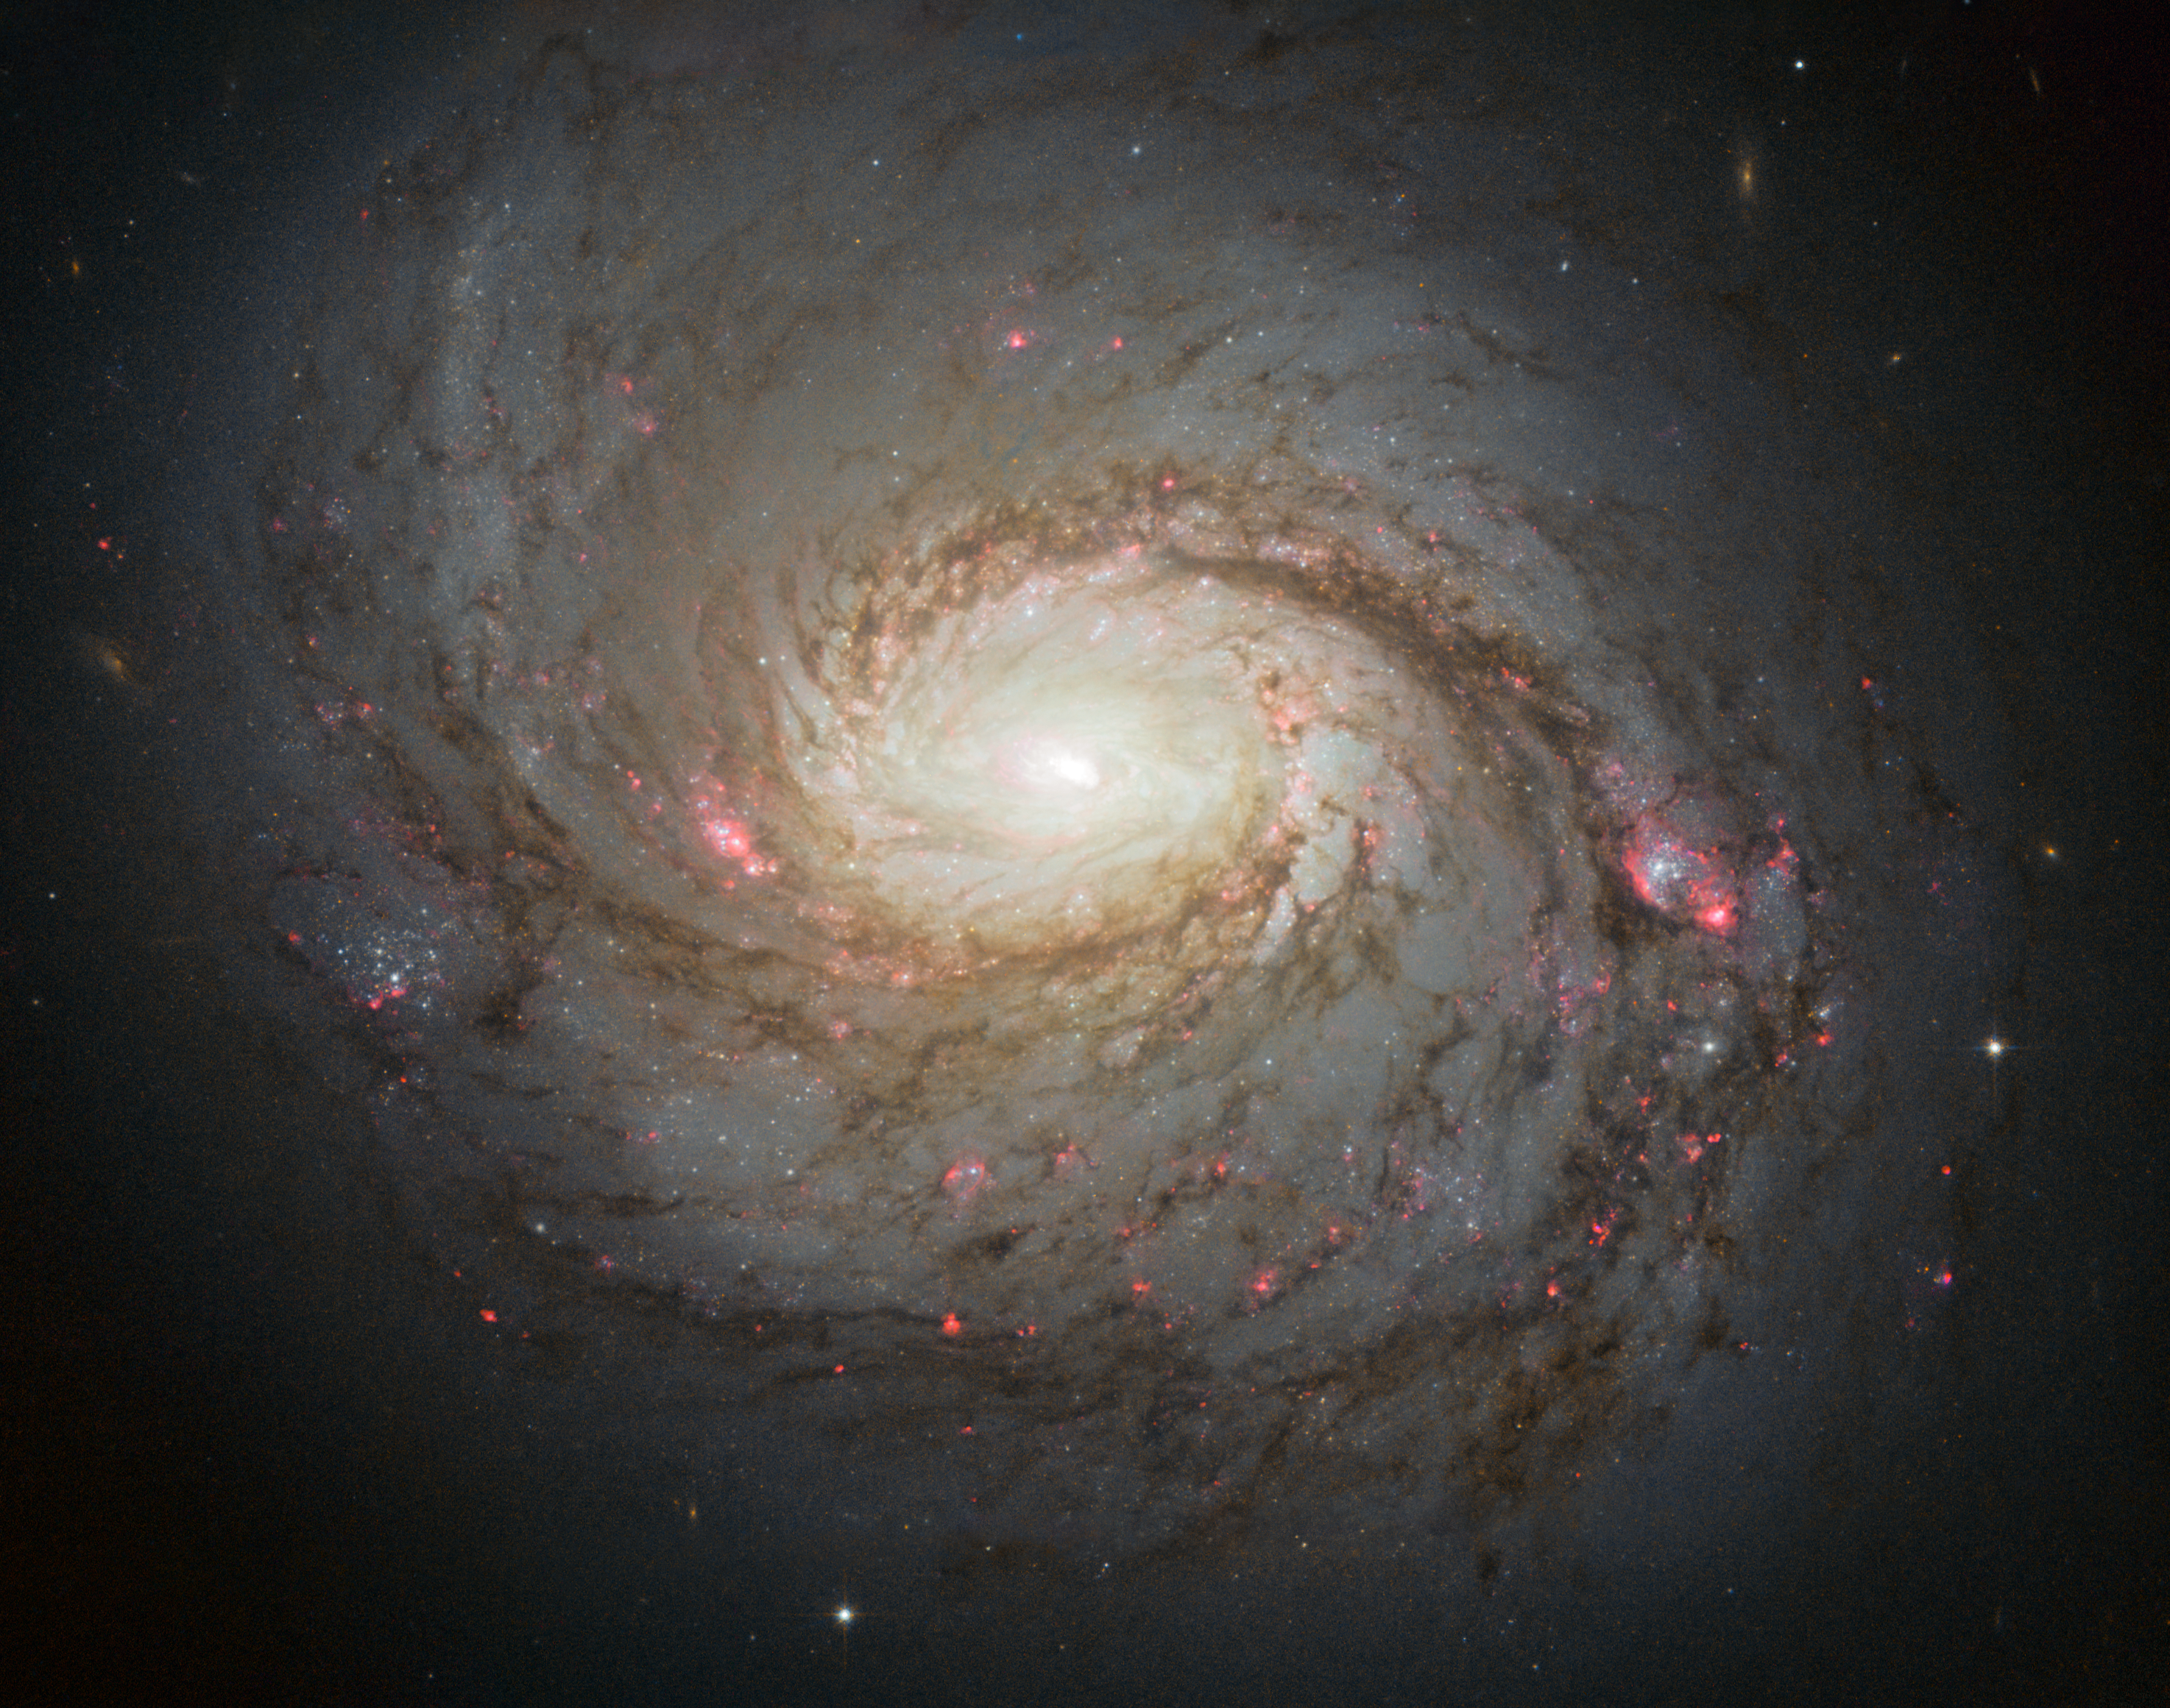

Hubble image of Messier 77

The NASA/ESA Hubble Space Telescope has captured this vivid image of spiral galaxy Messier 77 — a galaxy in the constellation of Cetus, some 45 million light-years away from us. The streaks of red and blue in the image highlight pockets of star formation along the pinwheeling arms, with dark dust lanes stretching across the galaxy’s starry centre. The galaxy belongs to a class of galaxies known as Seyfert galaxies, which have highly ionised gas surrounding an intensely active centre.

Credit: NASA, ESA & A. van der Hoeven